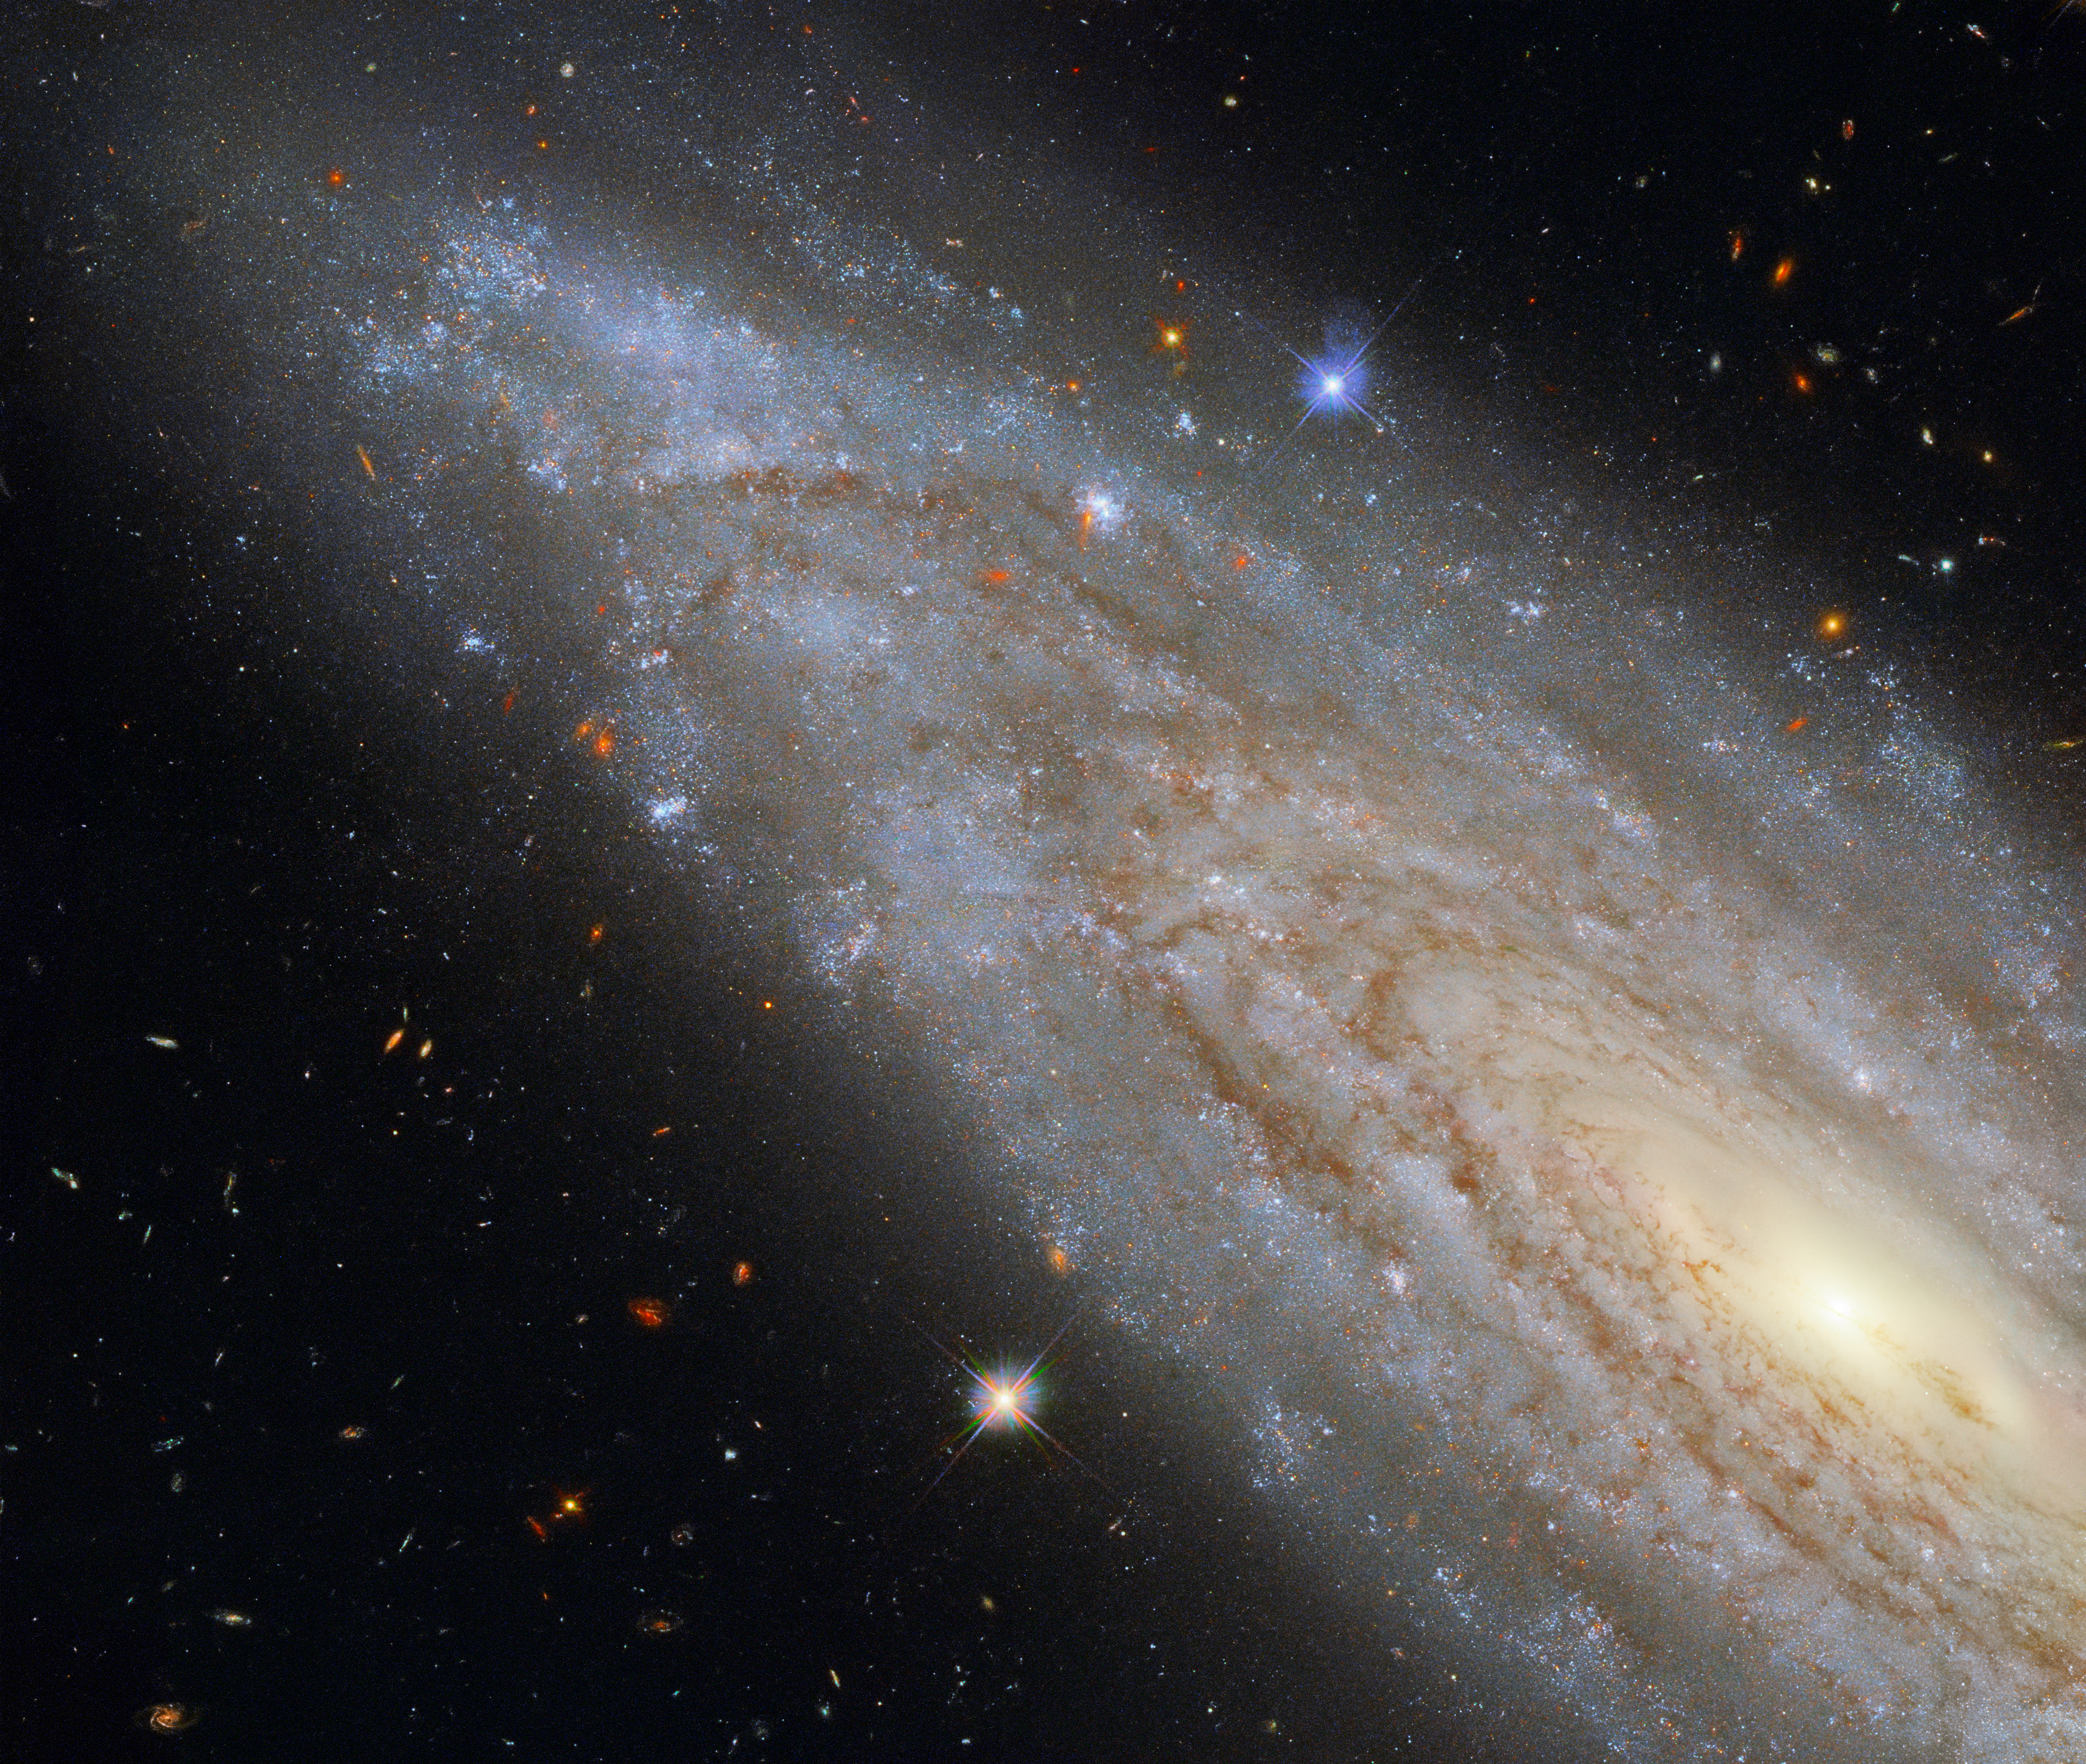

A Galactic Powerhouse

This image shows the spiral galaxy NGC 3254, observed using Hubble's Wide Field Camera 3 (WFC3). WFC3 has the capacity to observe ultraviolet, visible and near-infrared light, and this image is a composite of observations taken in the visible and infrared. In this image, NGC 3254 looks like a typical spiral galaxy, viewed side-on. However, NGC 3254 has a fascinating secret that it is hiding in plain sight — it is a Seyfert galaxy, meaning that it has an extraordinarily active core, known as an active galactic nucleus, which releases as much energy as the rest of the galaxy put together.

Seyfert galaxies are not rare — about 10% of all galaxies are thought to be Seyfert galaxies. They belong to the class of “active galaxies” — galaxies that have supermassive black holes at their centres that are actively accreting material, which releases vast amounts of radiation as it is accreted. There is a second, far more active, type of active galaxy that is known as a quasar. The active cores of Seyfert galaxies, such as NGC 3254, are brightest when observed in light outside the visible spectrum. At other wavelengths, this image would look very different, with the galaxy’s core shining extremely brightly.

Credit: ESA/Hubble & NASA, A. Riess et al.